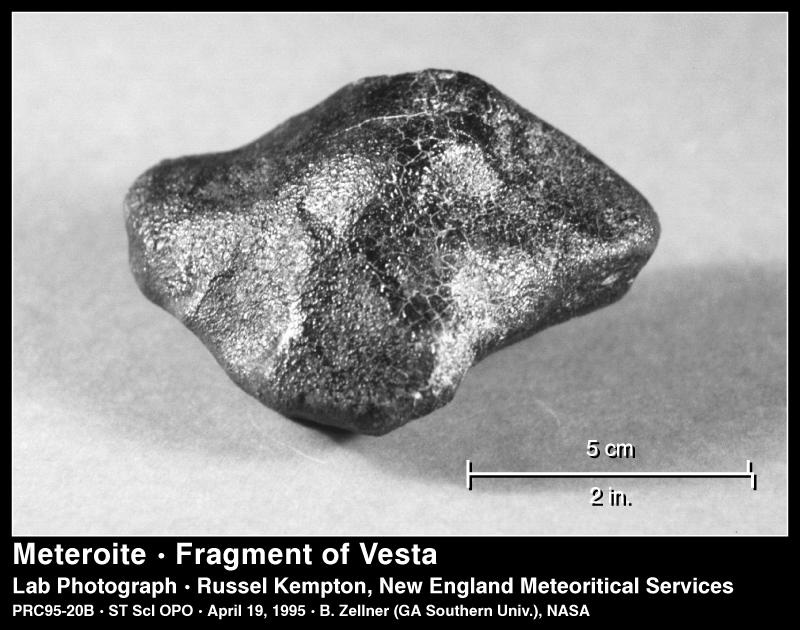

Fragment of Vesta

This meteorite is a sample of the crust of the asteroid Vesta, which is only the third solar system object beyond Earth where scientists have a laboratory sample (the other extraterrestrial samples are from Mars and the Moon).

Credit: R. Kempton (New England Meteoritical Services)